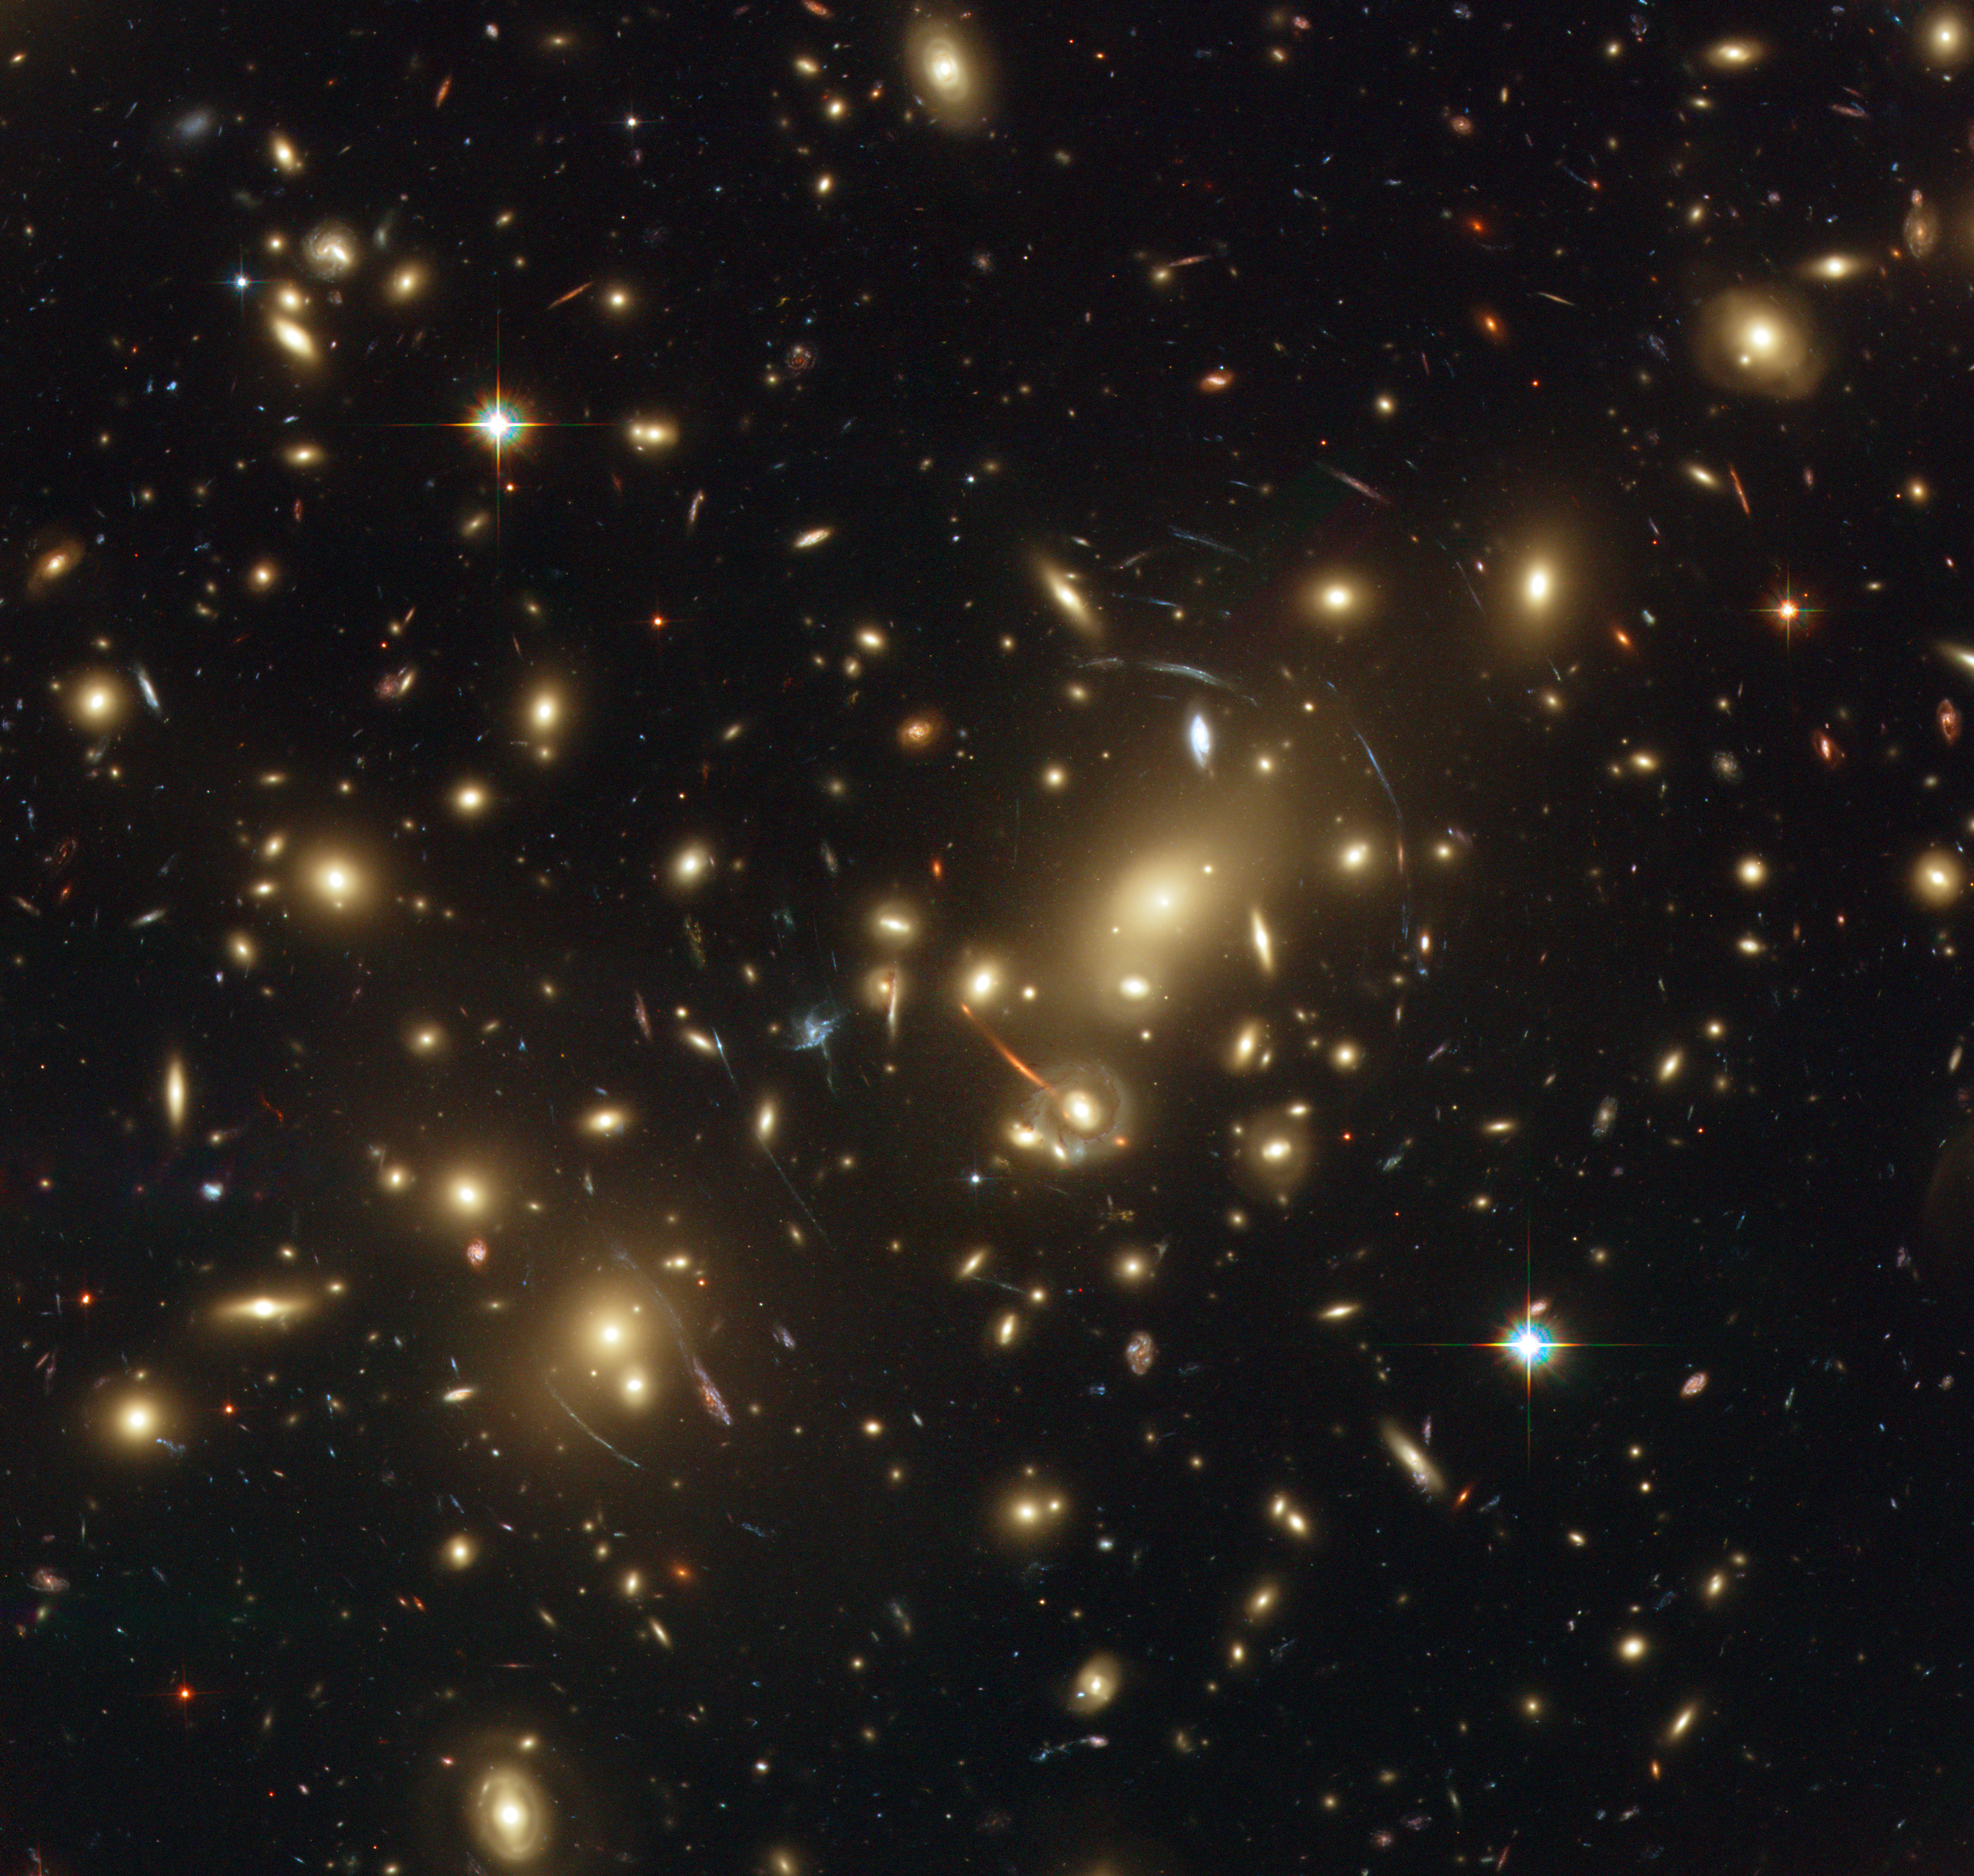

Abell 2218

The picture shows Abell 2218, a rich galaxy cluster composed of thousands of individual galaxies. It sits about 2.1 billion light-years from the Earth (redshift 0.17) in the northern constellation of Draco. When used by astronomers as a powerful gravitational lens to magnify distant galaxies, the cluster allows them to peer far into the Universe. However, it not only magnifies the images of hidden galaxies, but also distorts them into long, thin arcs.

Several arcs in the image can be studied in detail thanks to Hubble's sharp vision. Multiple distorted images of the same galaxies can be identified by comparing the shape of the galaxies and their colour. In addition to the giant arcs, many smaller arclets have been identified.

Credit: NASA, ESA, and Johan Richard (Caltech, USA) Acknowledgement: Davide de Martin & James Long (ESA/Hubble)